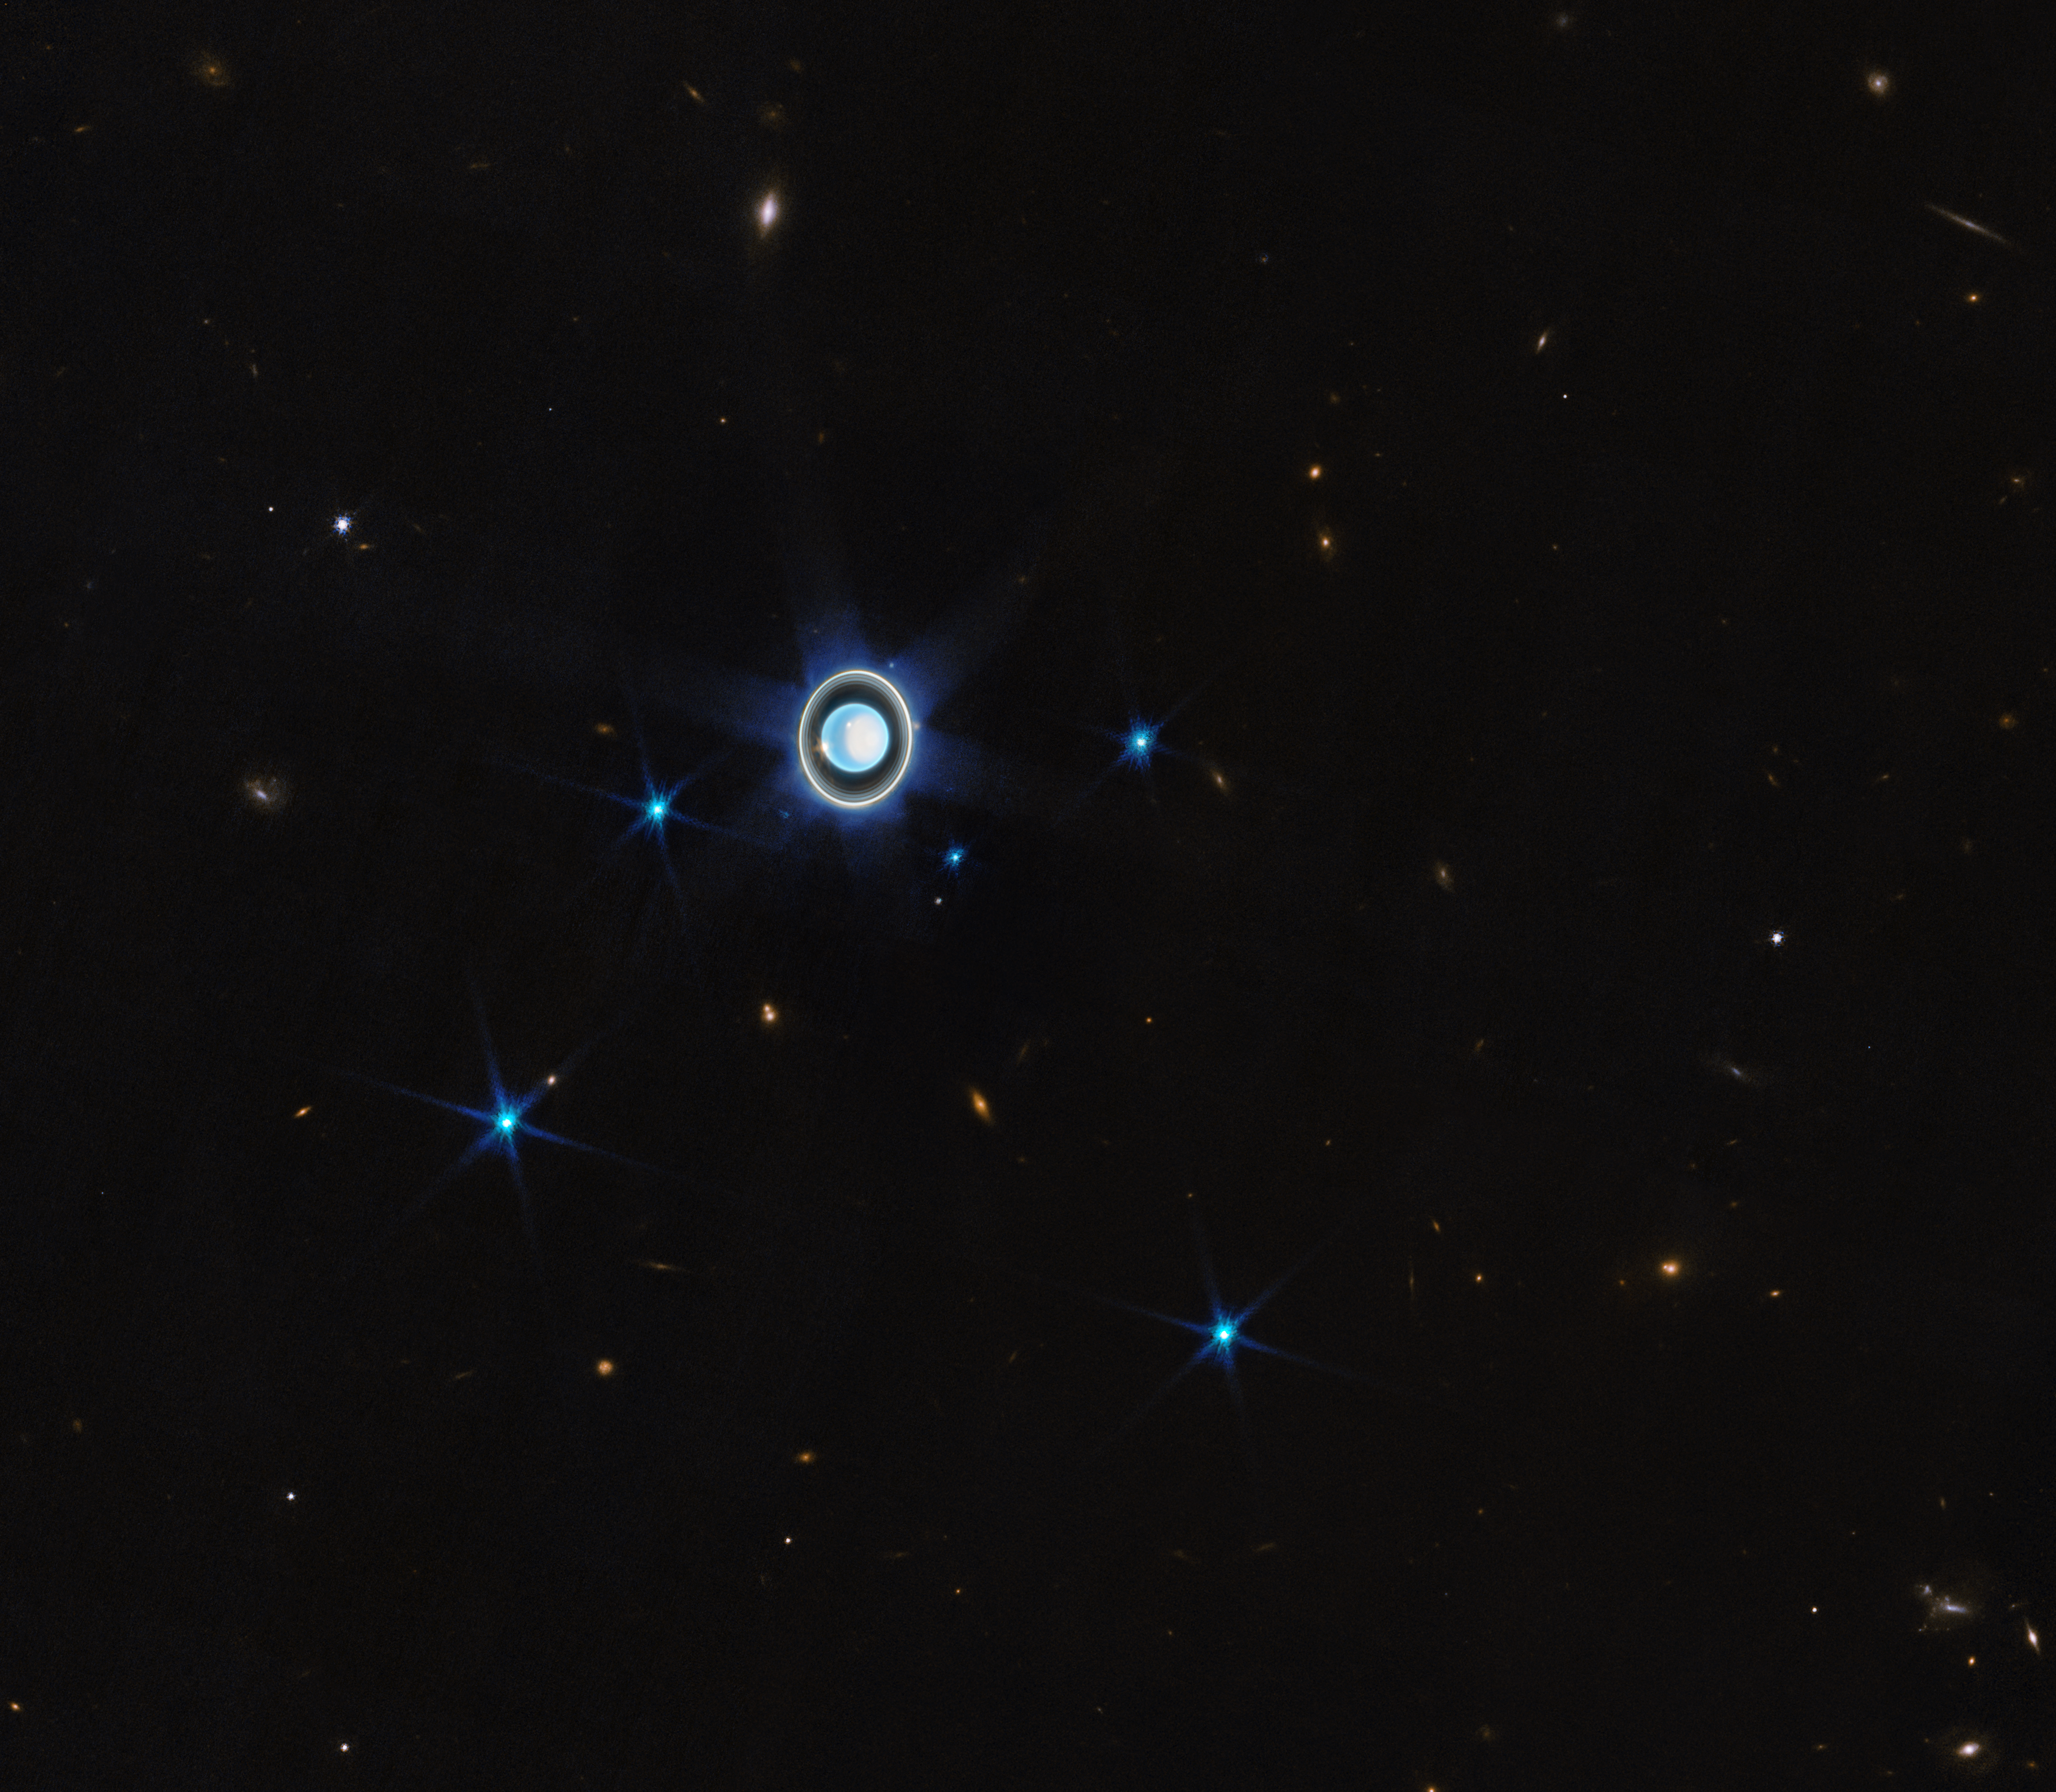

Wider view of the Uranian system

This wider view of the Uranian system with Webb’s NIRCam instrument features the planet Uranus as well as six of its 27 known moons (most of which are too small and faint to be seen in this short exposure). A handful of background objects, including many galaxies, are also seen.

Credit: NASA, ESA, CSA, STScI, J. DePasquale (STScI)